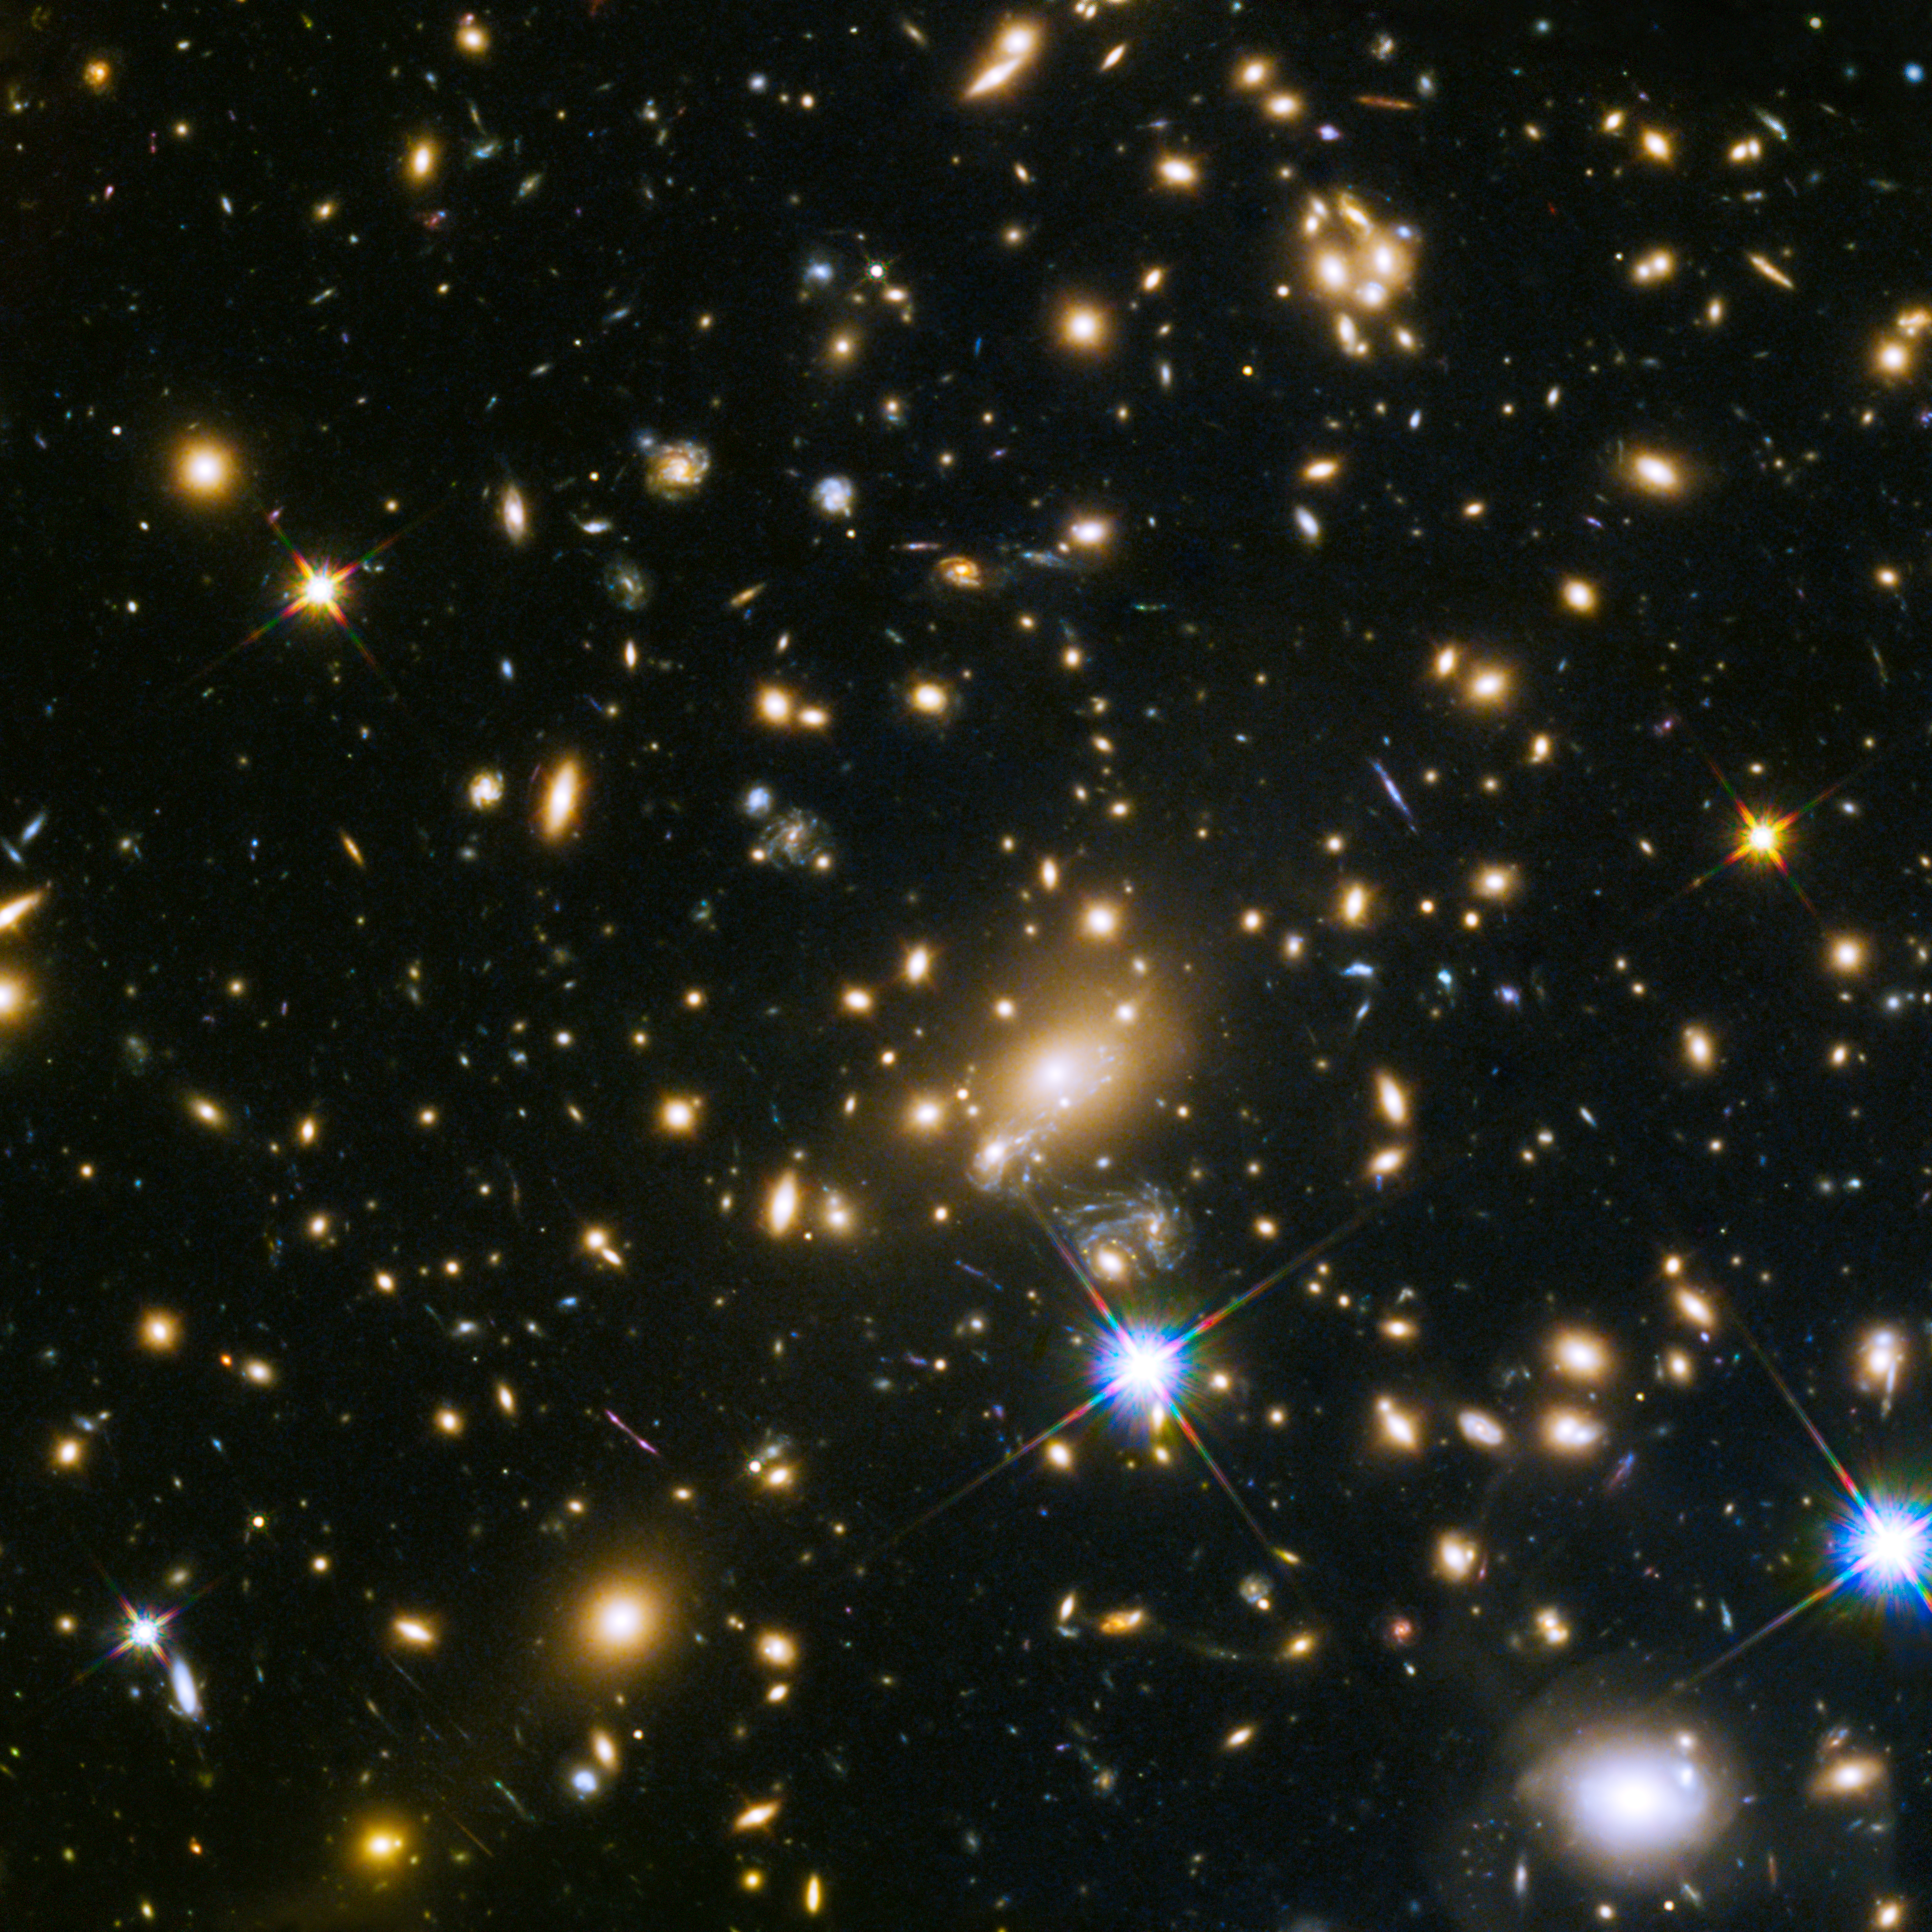

Galaxy cluster MACS j1149.5+223

This image shows the huge galaxy cluster MACS J1149.5+223, whose light took over 5 billion years to reach us.

The huge mass of the cluster is bending the light from more distant objects. The light from these objects has been magnified and distorted due to gravitational lensing. The same effect is creating multiple images of the same distant objects.

Credit: NASA, ESA, S. Rodney (John Hopkins University, USA) and the FrontierSN team; T. Treu (University of California Los Angeles, USA), P. Kelly (University of California Berkeley, USA) and the GLASS team; J. Lotz (STScI) and the Frontier Fields team; M. Postman (STScI) and the CLASH team; and Z. Levay (STScI)